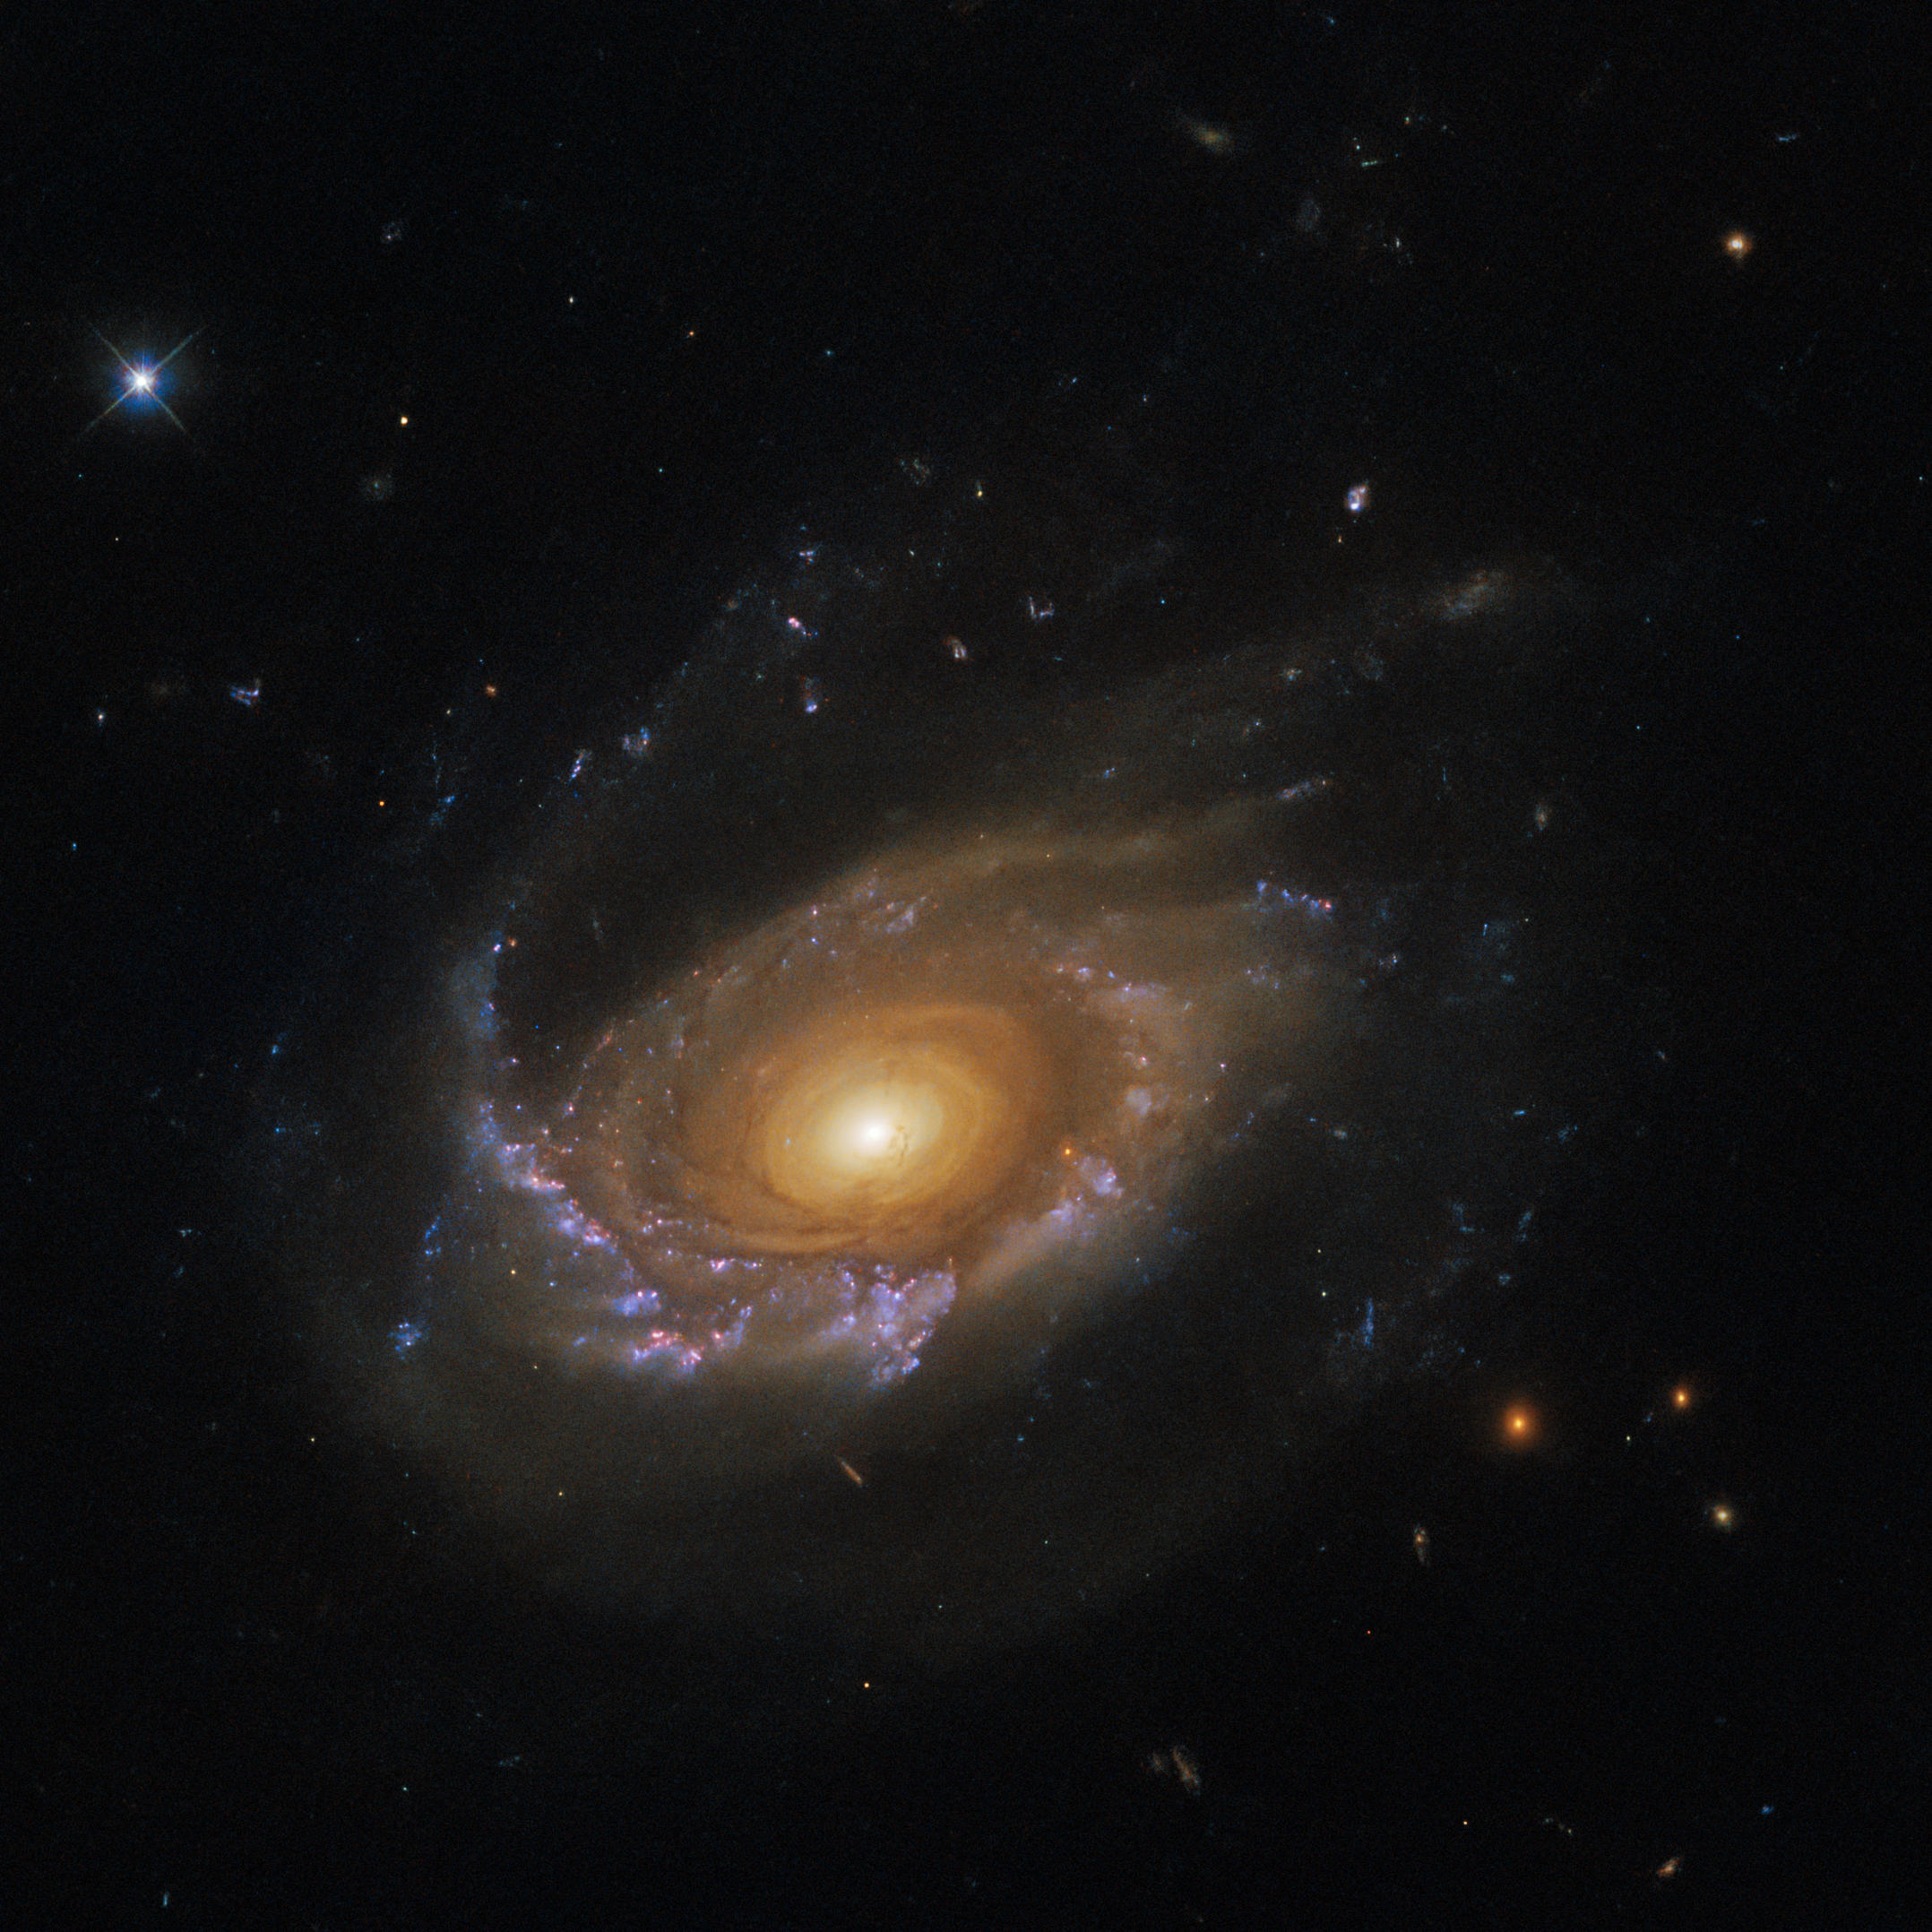

A jellyfish galaxy adrift

The jellyfish galaxy JW39 hangs serenely in this image from the NASA/ESA Hubble Space Telescope. This galaxy lies over 900 million light-years away in the constellation Coma Berenices, and is one of several jellyfish galaxies that Hubble has been studying over the past two years.

Despite this jellyfish galaxy’s serene appearance, it is adrift in a ferociously hostile environment; a galaxy cluster. Compared to their more isolated counterparts, the galaxies in galaxy clusters are often distorted by the gravitational pull of larger neighbours, which can twist galaxies into a variety of weird and wonderful shapes. If that was not enough, the space between galaxies in a cluster is also pervaded with a searingly hot plasma known as the intracluster medium. While this plasma is extremely tenuous, galaxies moving through it experience it almost like swimmers fighting against a current, and this interaction can strip galaxies of their star-forming gas.

This interaction between the intracluster medium and the galaxies is called ram-pressure stripping, and is the process responsible for the trailing tendrils of this jellyfish galaxy. As JW39 has moved through the cluster the pressure of the intracluster medium has stripped away gas and dust into long trailing ribbons of star formation that now stretch away from the disc of the galaxy.

Astronomers using Hubble’s Wide Field Camera 3 studied these trailing tendrils in detail, as they are a particularly extreme environment for star formation. Surprisingly, they found that star formation in the ‘tentacles’ of jellyfish galaxies was not noticeably different from star formation in the galaxy disc.

Credit: ESA/Hubble & NASA, M. Gullieuszik and the GASP team